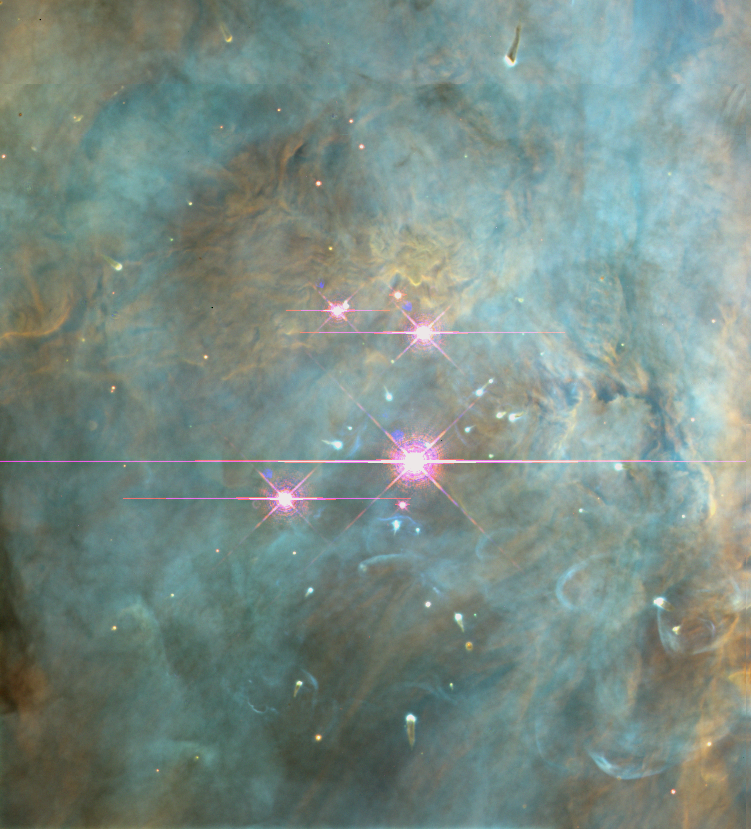

Trapezium, Orion Nebula

The Orion nebula has a dramatic surface topography — of glowing gasses instead of rock — with peaks, valleys and walls. They are illuminated and heated by a torrent of energetic ultraviolet light from its four hottest and most massive stars, called the Trapezium, which are pictured here.

In addition to the Trapezium, this stellar cavern contains 700 hundred other young stars at various stages of formation. High-speed jets of hot gas spewed by some of the infant stars send supersonic shock waves tearing into the nebula at 100,000 miles per hour.

Credit: NASA, C.R. O'Dell and S.K. Wong (Rice University)